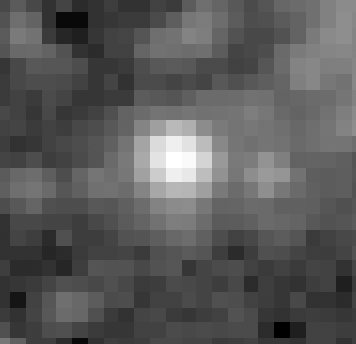

Melnick 34

The best available ground-based image of Melnick 34. This image was taken under ideal atmospheric conditions when the width of a star image was about 0.6 arc seconds. This image was used in a NASA release that showed the superiority of the NASA/ESA Hubble Space Telescope for imaging these objects.

Credit: Dr. Georges Meylan of the European Southern Observatory